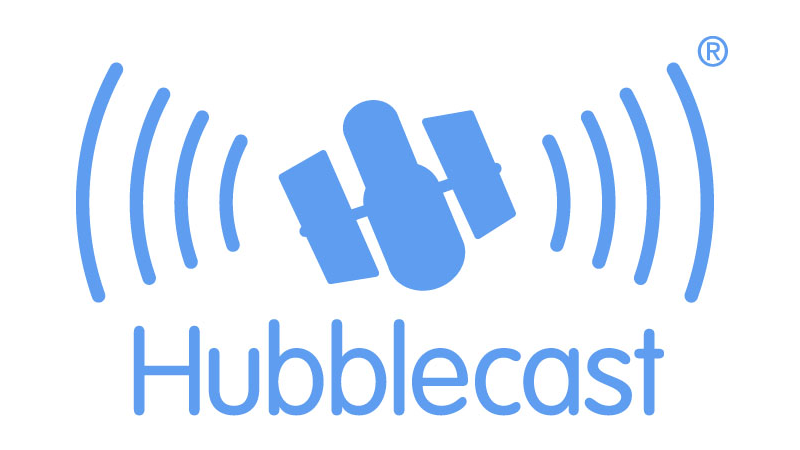

Welcome to Hubblecast!!!

Now you can follow the latest and coolest news and images from the NASA/ESA Hubble Space Telescope anytime, anywhere, for free! Just subscribe to the Hubblecast (see the links below).

Hubblecast is a Vodcast produced by the ESA/Hubble team in Germany. A Vodcast is a short name for Video On Demand and casting, and is a term used for the online delivery of video clips content, often distributed via so-called RSS feeds.

By starting to spread astronomical news using this new technology, we hope to reach and inspire an even broader range of the community, providing the most recent and interesting discoveries made by the "eyes" of the NASA/ESA Hubble Space Telescope.

Video podcasts can be downloaded and watched from a portable media player (for example video iPods), and also with a computer as a file or a stream.

All you need is iTunes, or a similar programme to play video podcasts, or an RSS software (like Doppler, DTV, FireANT, iPodderX, PenguinTV, etc.). Sign up to the Hubblecasts and receive the new files automatically every time they are released.

The young enthusiastic host of the Hubblecast is Dr. J. He is a German astronomer working at the European Organization for Astronomical Research in the Southern Hemisphere (ESO). His scientific interests are in cosmology, particularly on galaxy evolution and quasars. Dr. J's real name is Joe Liske and he has a PhD in astronomy.

Credit: NASA & ESA